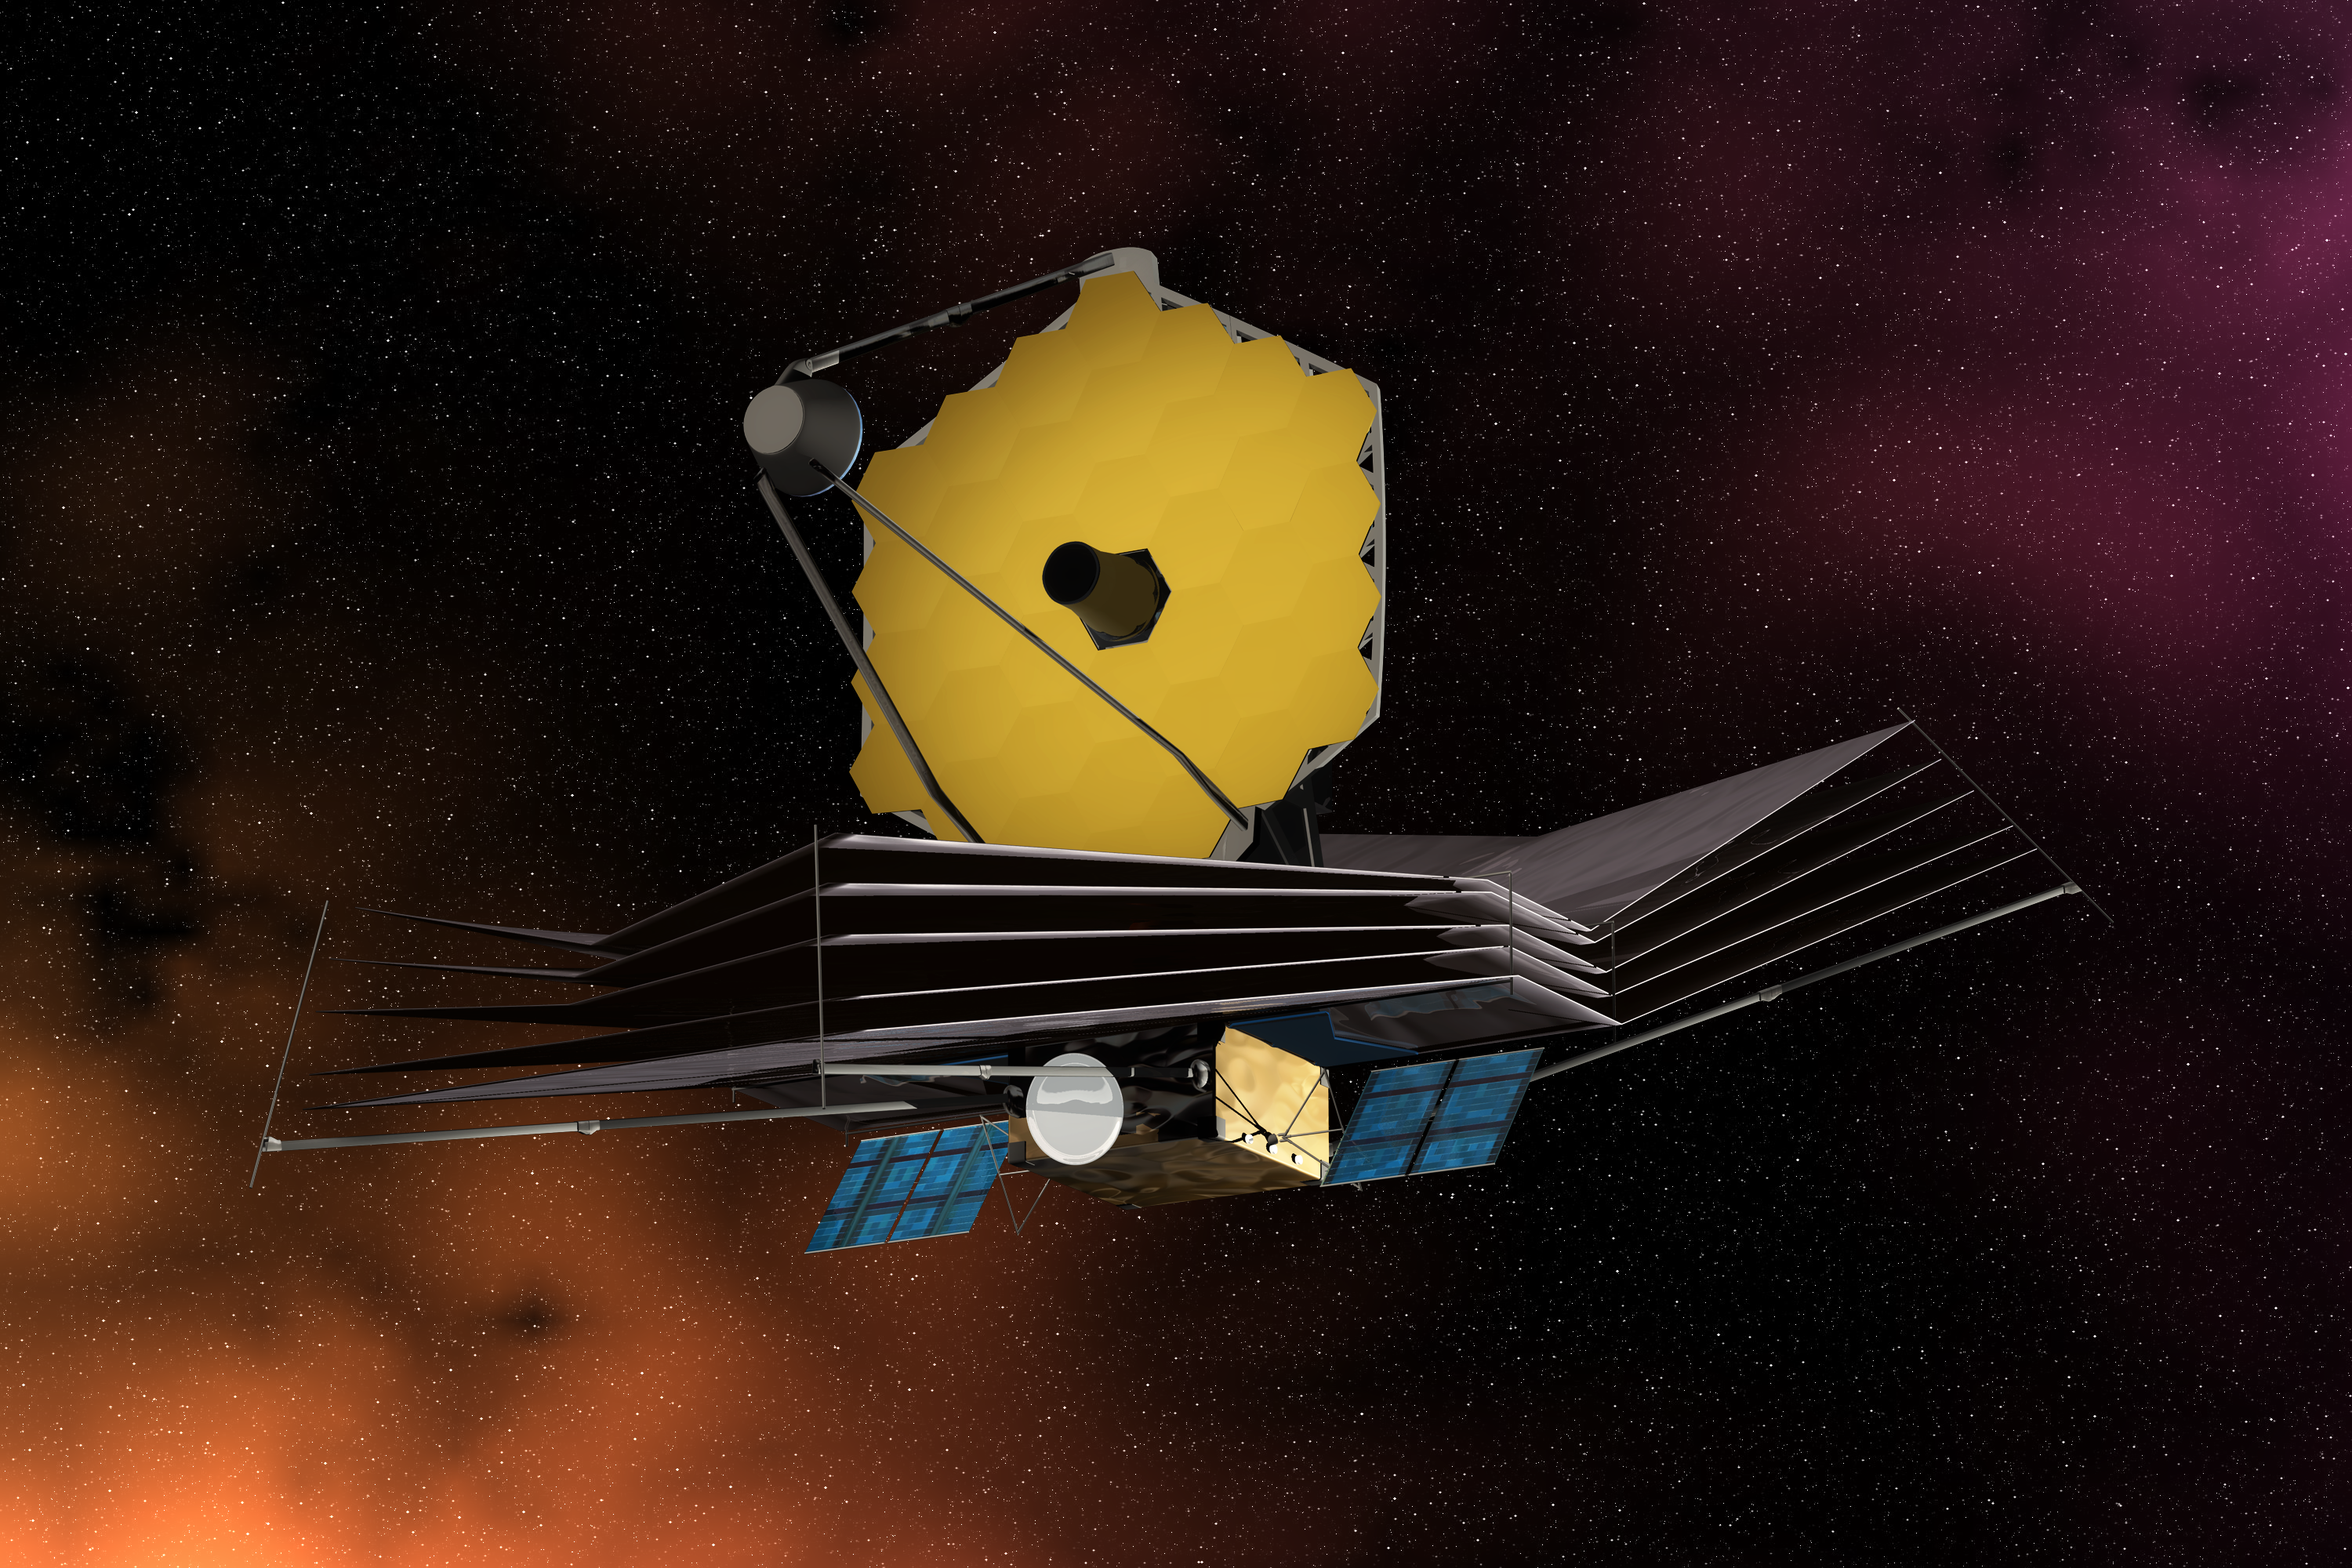

The James Webb Space Telescope (artist's impression)

The James Web Space Telescope displaying its primary mirror, sun shield, solar panels and spacecraft bus.

Credit: ESA